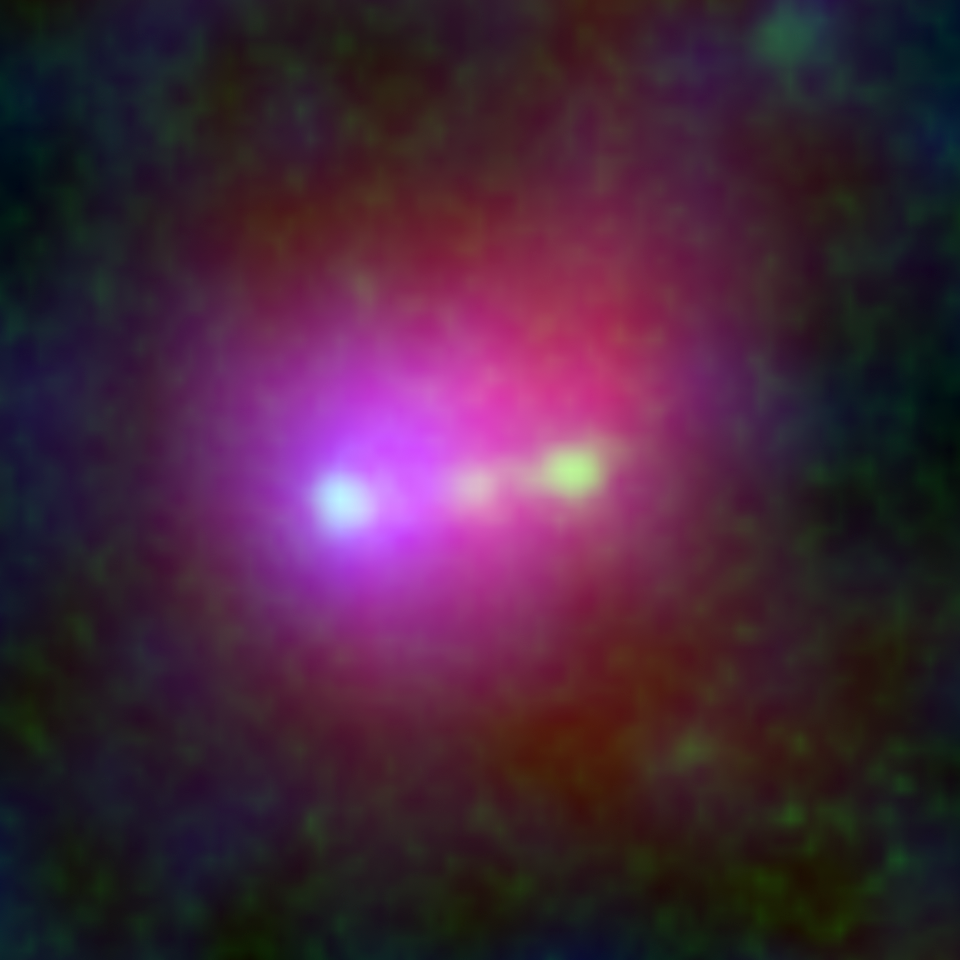

Himiko (Subaru, Hubble, and Spitzer close-up view)

This image shows a giant primordial bubble of gas dubbed "Himiko" (after the queen of ancient Japan), as viewed by Hubble, Subaru, and Spitzer. The combination of three Hubble infrared bands is green, while Lyman-alpha emission captured by Subaru Suprime-Cam and infrared 3.6 micron taken by the Spitzer Infrared Array Camera are presented with blue and red, respectively.

Astronomers using the combined power of the NASA/ESA Hubble Space Telescope and the Atacama Large Millimeter/submillimeter Array (ALMA) telescope have discovered that a trio of primitive galaxies are actually nestled inside this enormous gas blob. The rare triple system existed when the Universe was only 800 million years old. The trio may eventually merge into a single massive galaxy, researchers predict.

Credit: NASA, ESA, ESO, NRAO, NAOJ, JAO, M. Ouchi (University of Tokyo), R. Ellis (California Institute of Technology), Y. Ono (University of Tokyo), K. Nakanishi (The Graduate University for Advanced Studies (SOKENDAI) and Joint ALMA Observatory), K. Kohno and R. Momose (University of Tokyo), Y. Kurono (Joint ALMA Observatory), M. Ashby (Harvard-Smithsonian Center for Astrophysics), K. Shimasaku (University of Tokyo), S. Willner and G. Fazio (Harvard-Smithsonian Center for Astrophysics), Y. Tamura (University of Tokyo), and D. Iono (National Astronomical Observatory of Japan)